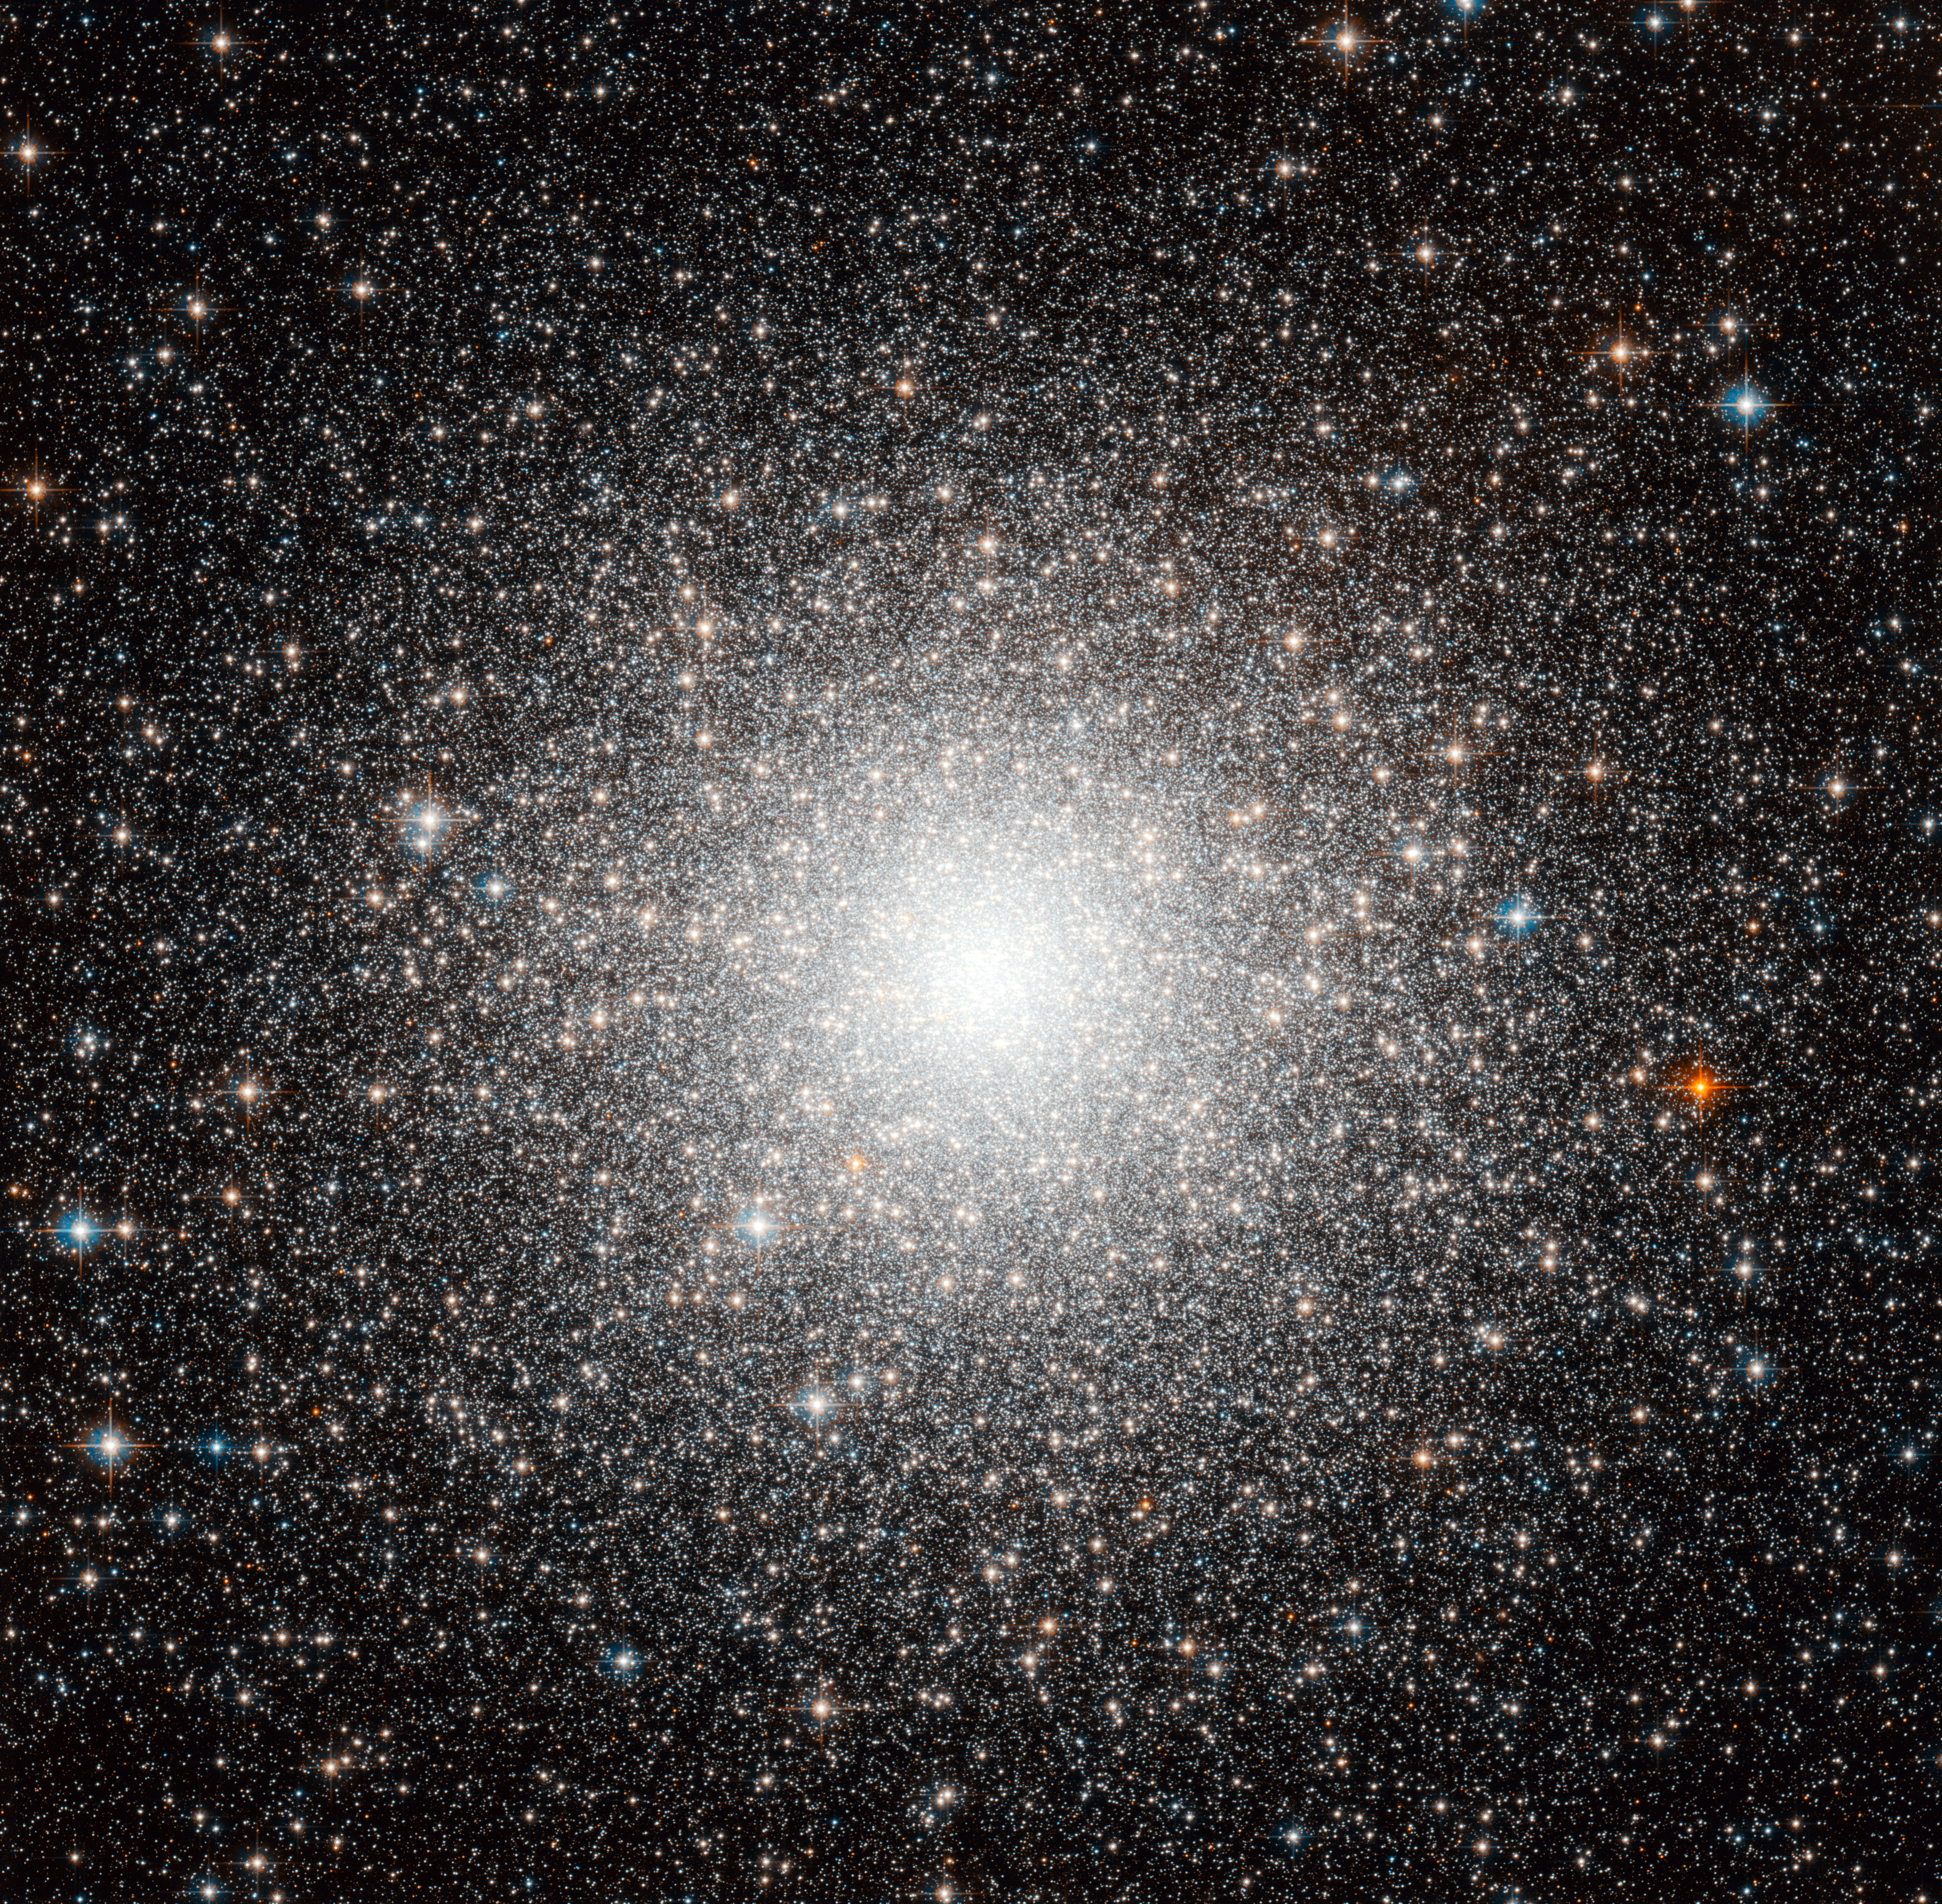

First globular cluster outside the Milky Way

The object shown in this beautiful Hubble image, dubbed Messier 54, could be just another globular cluster, but this dense and faint group of stars was in fact the first globular cluster found that is outside our galaxy. Discovered by the famous astronomer Charles Messier in 1778, Messier 54 belongs to a satellite of the Milky Way called the Sagittarius Dwarf Elliptical Galaxy.

Messier had no idea of the significance of his discovery at the time, and it wasn’t until over two centuries later, in 1994, that astronomers found Messier 54 to be part of the miniature galaxy and not our own. Current estimates indicate that the Sagittarius dwarf, and hence the cluster, is situated almost 90 000 light-years away — more than three times as far from the centre of our galaxy than the Solar System.

Ironically, even though this globular cluster is now understood to lie outside the Milky Way, it will actually become part of it in the future. The strong gravitational pull of our galaxy is slowly engulfing the Sagittarius dwarf, which will eventually merge with the Milky Way creating one much larger galaxy.

This picture is a composite created by combining images taken with the Wide Field Channel of Hubble’s Advanced Camera for Surveys. Light that passed through a yellow-orange (F606W) was coloured blue and light passing through a near-infrared filter (F814W) was coloured red. The total exposure times were 3460 s and 3560 s, respectively and the field of view is approximately 3.4 by 3.4 arcminutes.

Credit: ESA/Hubble & NASA